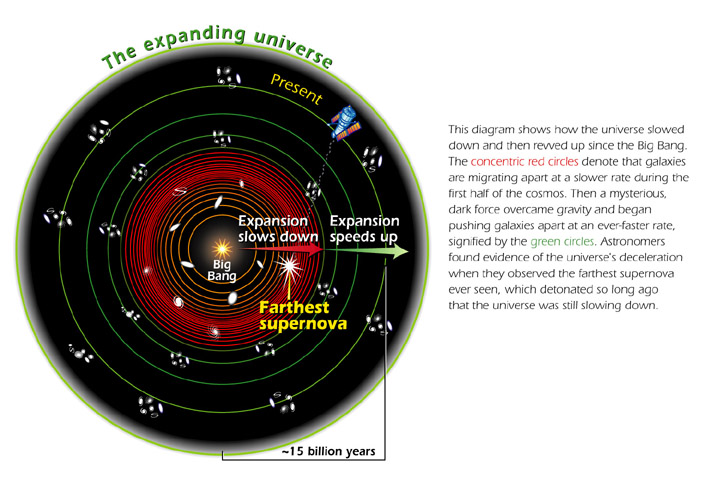

The expanding Universe

This diagram shows how the universe slowed down and then revved since the Big Bang.

Credit: Ann Feild (STScI)